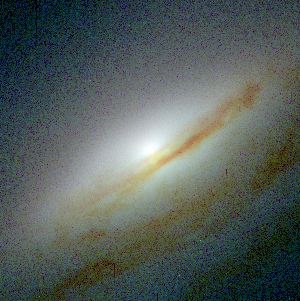

Central bulges of piral galaxies - NGC 5689 (Hubble NICMOS and WFPC2 view)

This image represents composite pictures from Hubble's visible- and infrared-light cameras, the Wide Field and Planetary Camera 2(WFPC2) and the Near Infrared Camera and Multi-Object Spectrometer(NICMOS). Astronomers combined views from both cameras to obtain the true ages of the stars surrounding each galaxy's bulge. The Hubble telescope's sharper resolution allows astronomers to study the intricate structure of a galaxy's core.

Credit: NASA, ESA, and Reynier Peletier (University of Nottingham, United Kingdom)